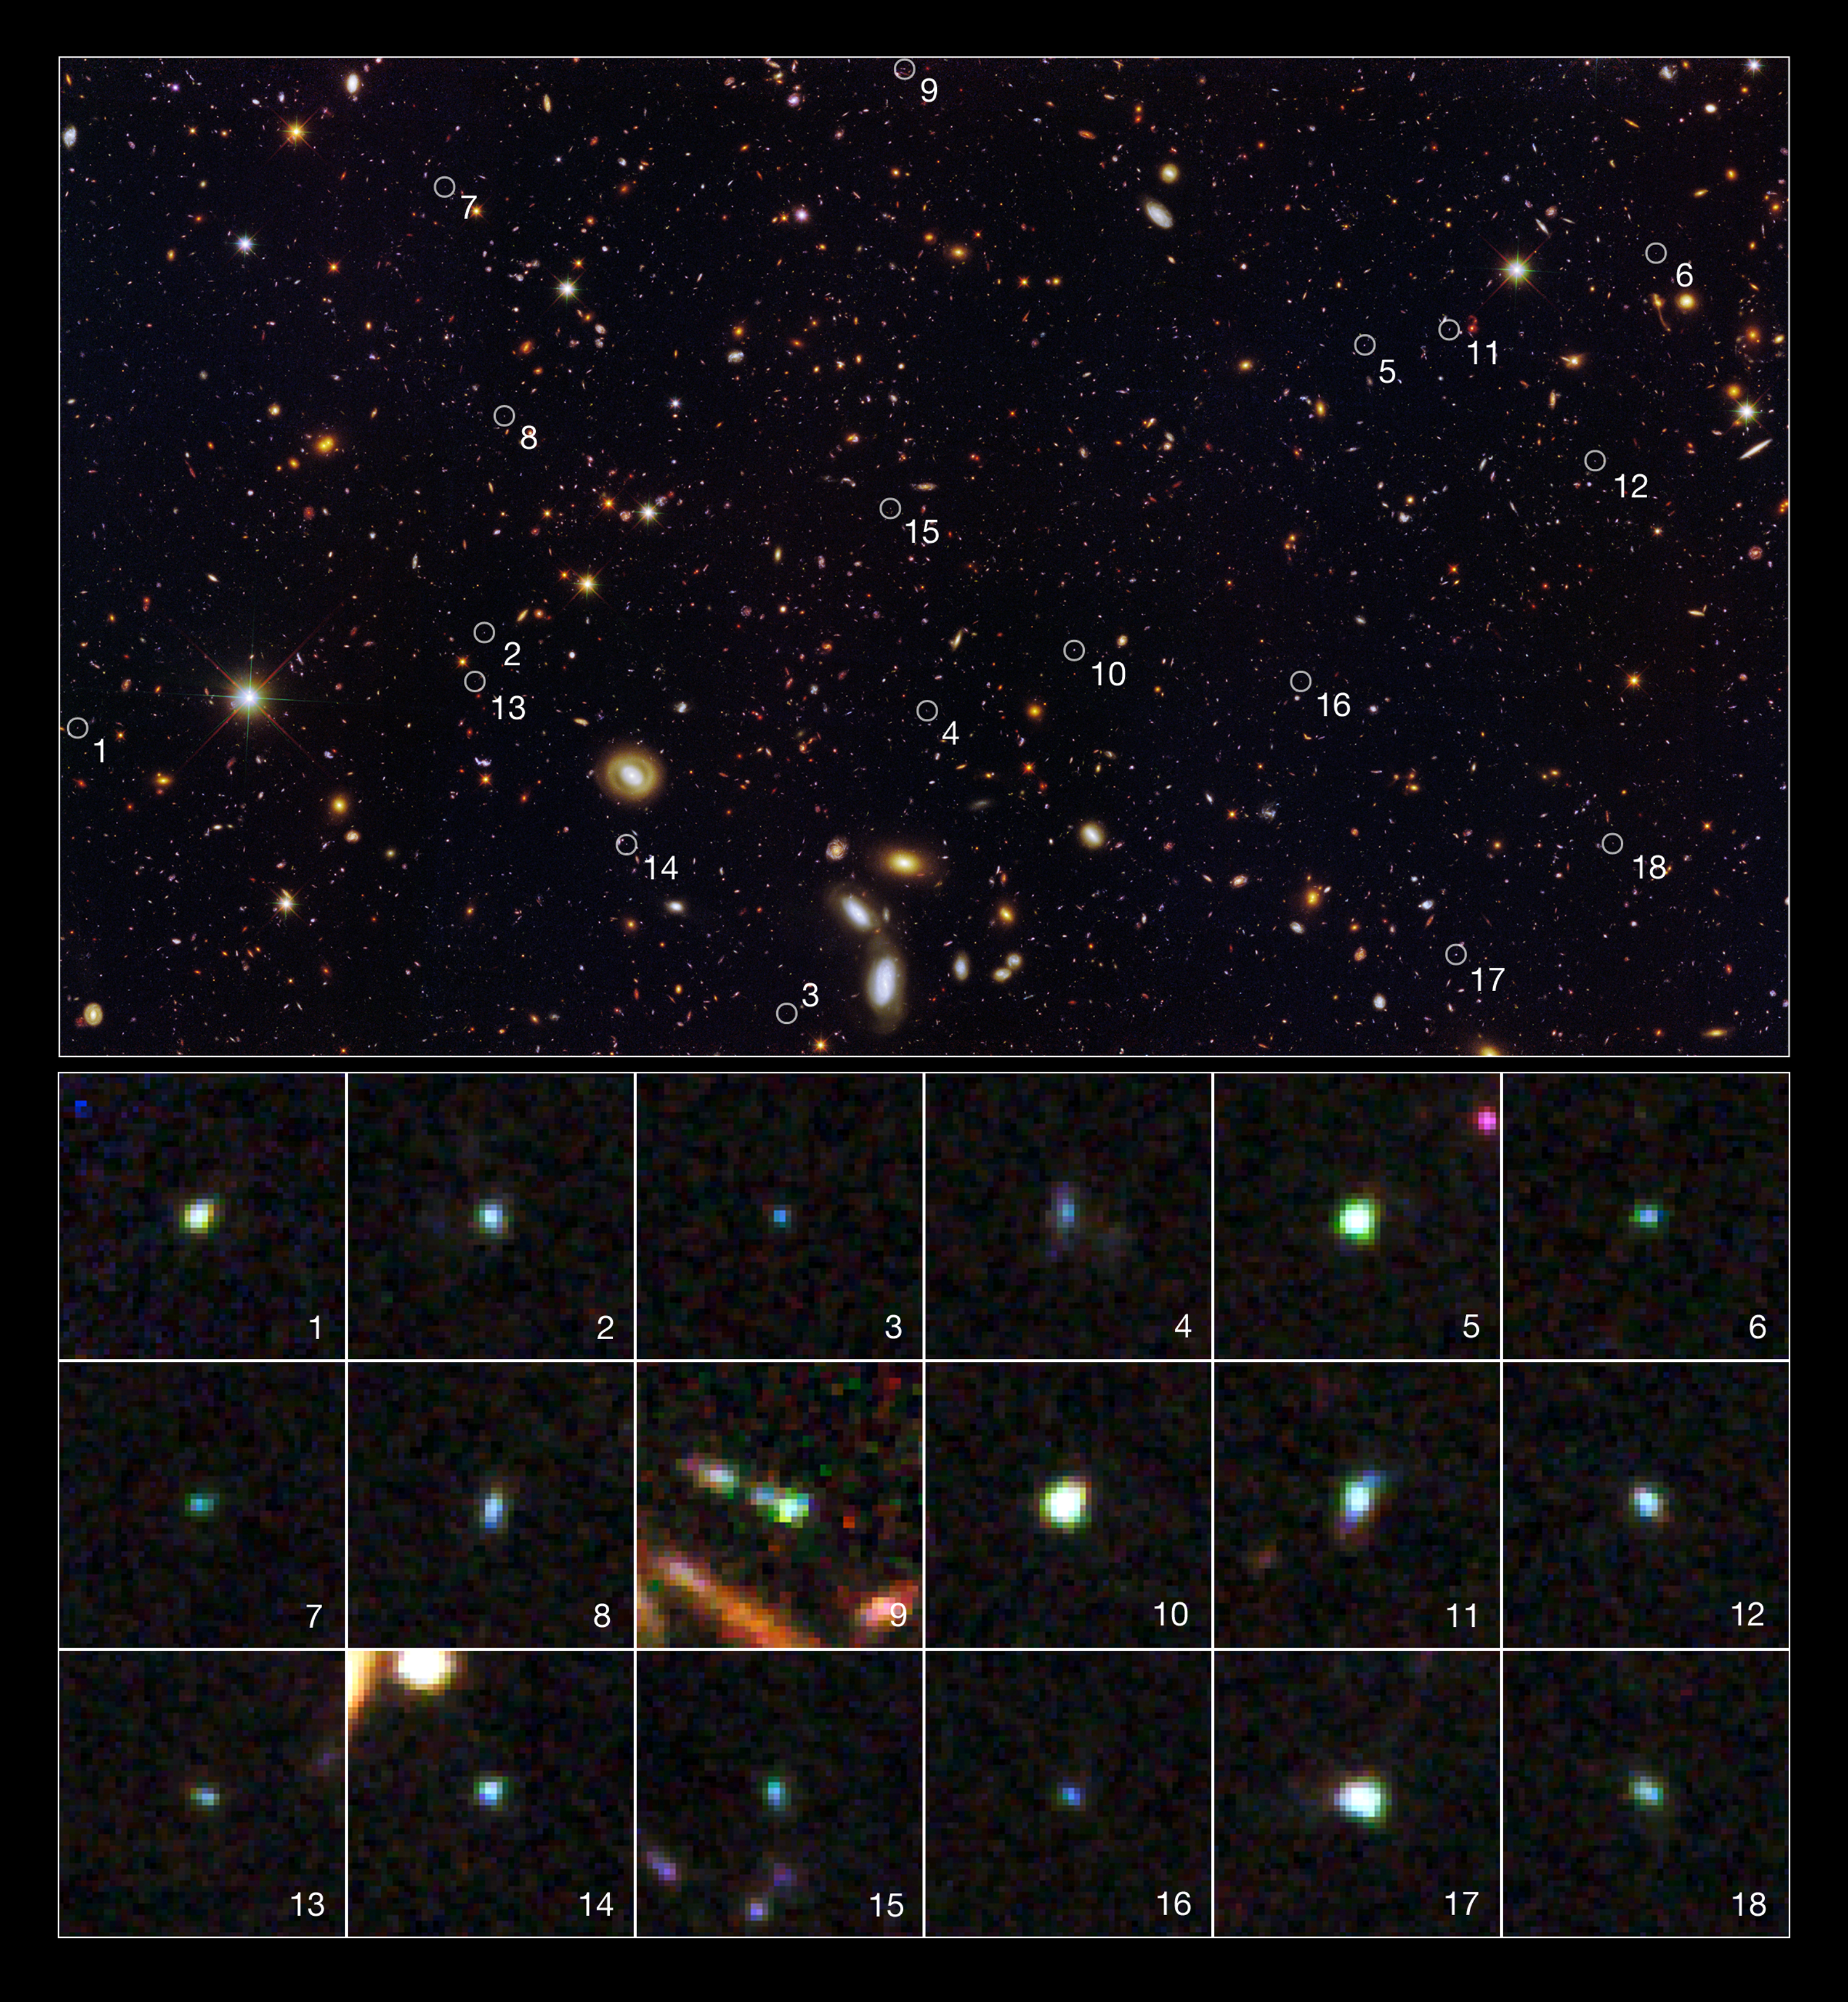

Tiny galaxies brimming with star birth

This image reveals 18 tiny galaxies uncovered by the NASA/ESA Hubble Space Telescope. The puny galaxies, shown in the postage-stamp-sized images, existed 9 billion years ago and are brimming with star birth.

The dwarf galaxies are typically a hundred times less massive than the Milky Way galaxy but are churning out stars at such a furious pace that their stellar population would double in just 10 million years. Hubble’s Wide Field Camera 3 and Advanced Camera for Surveys spied the galaxies in a field called the Great Observatories Origins Deep Survey (GOODS). The galaxies' locations in the GOODS field are marked in the large image.

The galaxies stood out in the Hubble images because the energy from all the new stars caused the oxygen in the gas surrounding them to light up like a bright fluorescent sign. The rapid star birth likely represents an important phase in the formation of dwarf galaxies, the most common galaxy type in the cosmos.

The galaxies are among 69 dwarf galaxies found in the GOODS and other fields.

Images of the individual galaxies were taken November 2010 to January 2011. The large image showing the location of the galaxies was taken between September 2002 and December 2004, and between September 2009 and October 2009.

Credit: NASA, ESA, A. van der Wel (Max Planck Institute for Astronomy), H. Ferguson and A. Koekemoer (Space Telescope Science Institute), and the CANDELS team